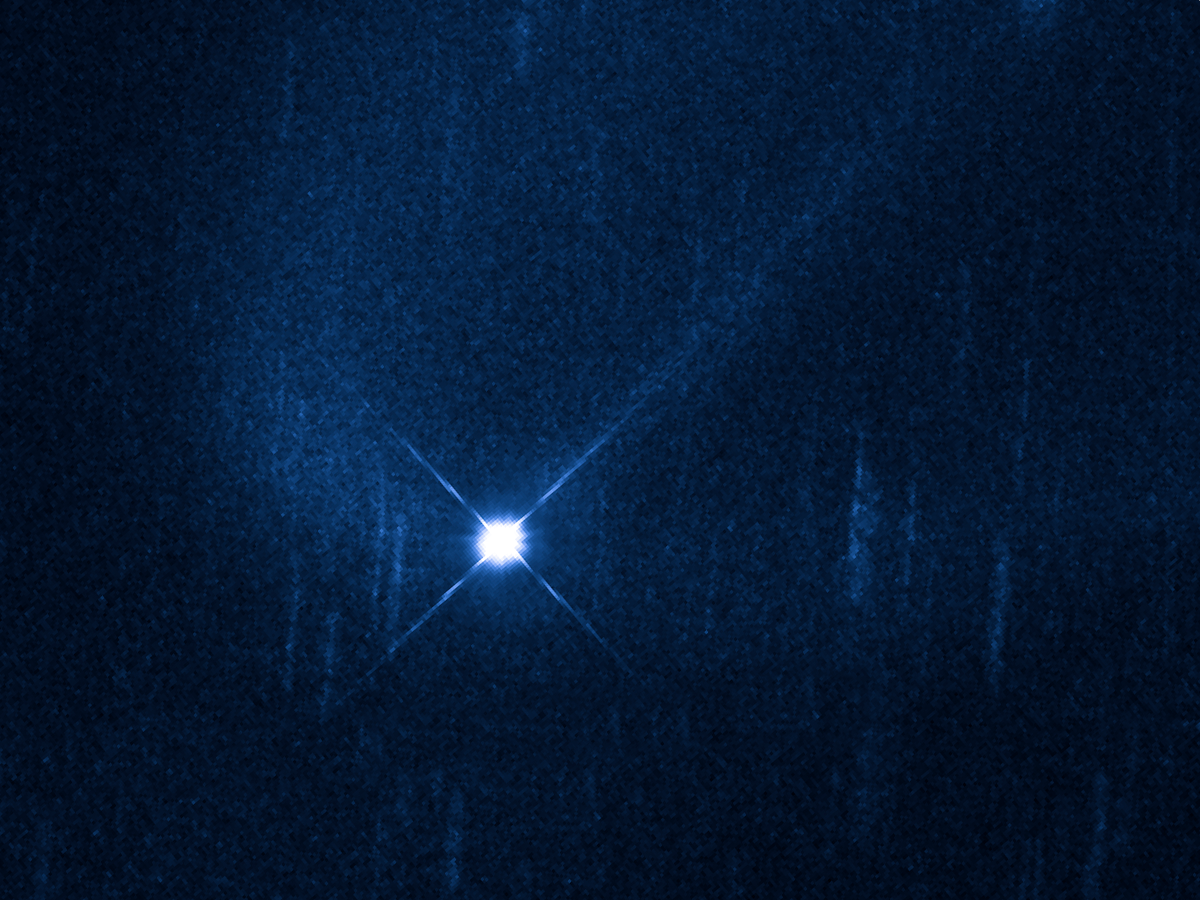

Hubble observes aftermath of suspected asteroid collision

This is a Hubble Space Telescope picture of asteroid (596) Scheila, as observed on 27 Dec 2010. The visible-light image was taken with Hubble's Wide Field Camera 3 when the asteroid was approximately 350 million kilometres away. The asteroid is surrounded by a C-shaped cloud, or coma, of dust particles. A linear tail of dust can also be seen streaming behind the asteroid. The asteroid body, which is approximately 110 kilometres across, appears star-like because it is overexposed so that the faint dust can be imaged.

A second Hubble observation on 4 Jan 2011, showed that the dusty coma had faded by 30 percent. These data are consistent with the idea that Hubble is observing the aftermath of a collision between Scheila and a much smaller body that blasted debris from the surface. This would be the second time a collision between two asteroids has been witnessed.

Credit: NASA, ESA, D. Jewitt (UCLA, USA) and M. Mutchler (STScI)